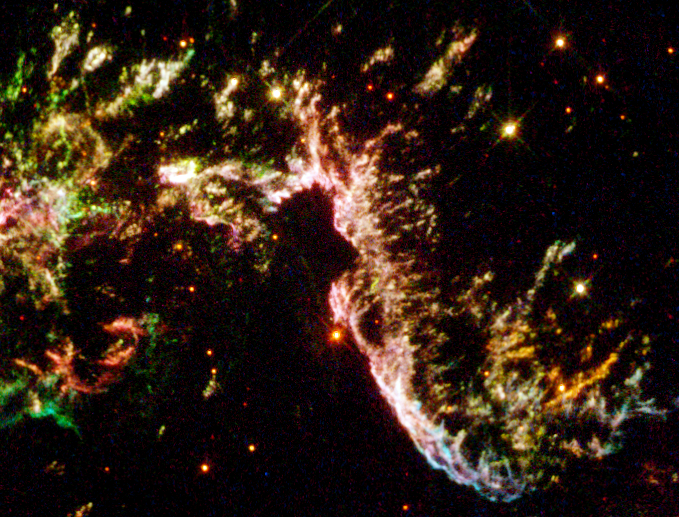

Details of Supernova Remnant Cassiopeia A

This is a section of Cassiopeia A, the youngest known supernova remnant in our Milky Way Galaxy. These streamer like remains of an exploding star are 10,000 light-years away in the constellation Cassiopeia and were first observed from Earth 320 years ago.

Credit: NASA/ESA and the Hubble Heritage Team (STScI/AURA)